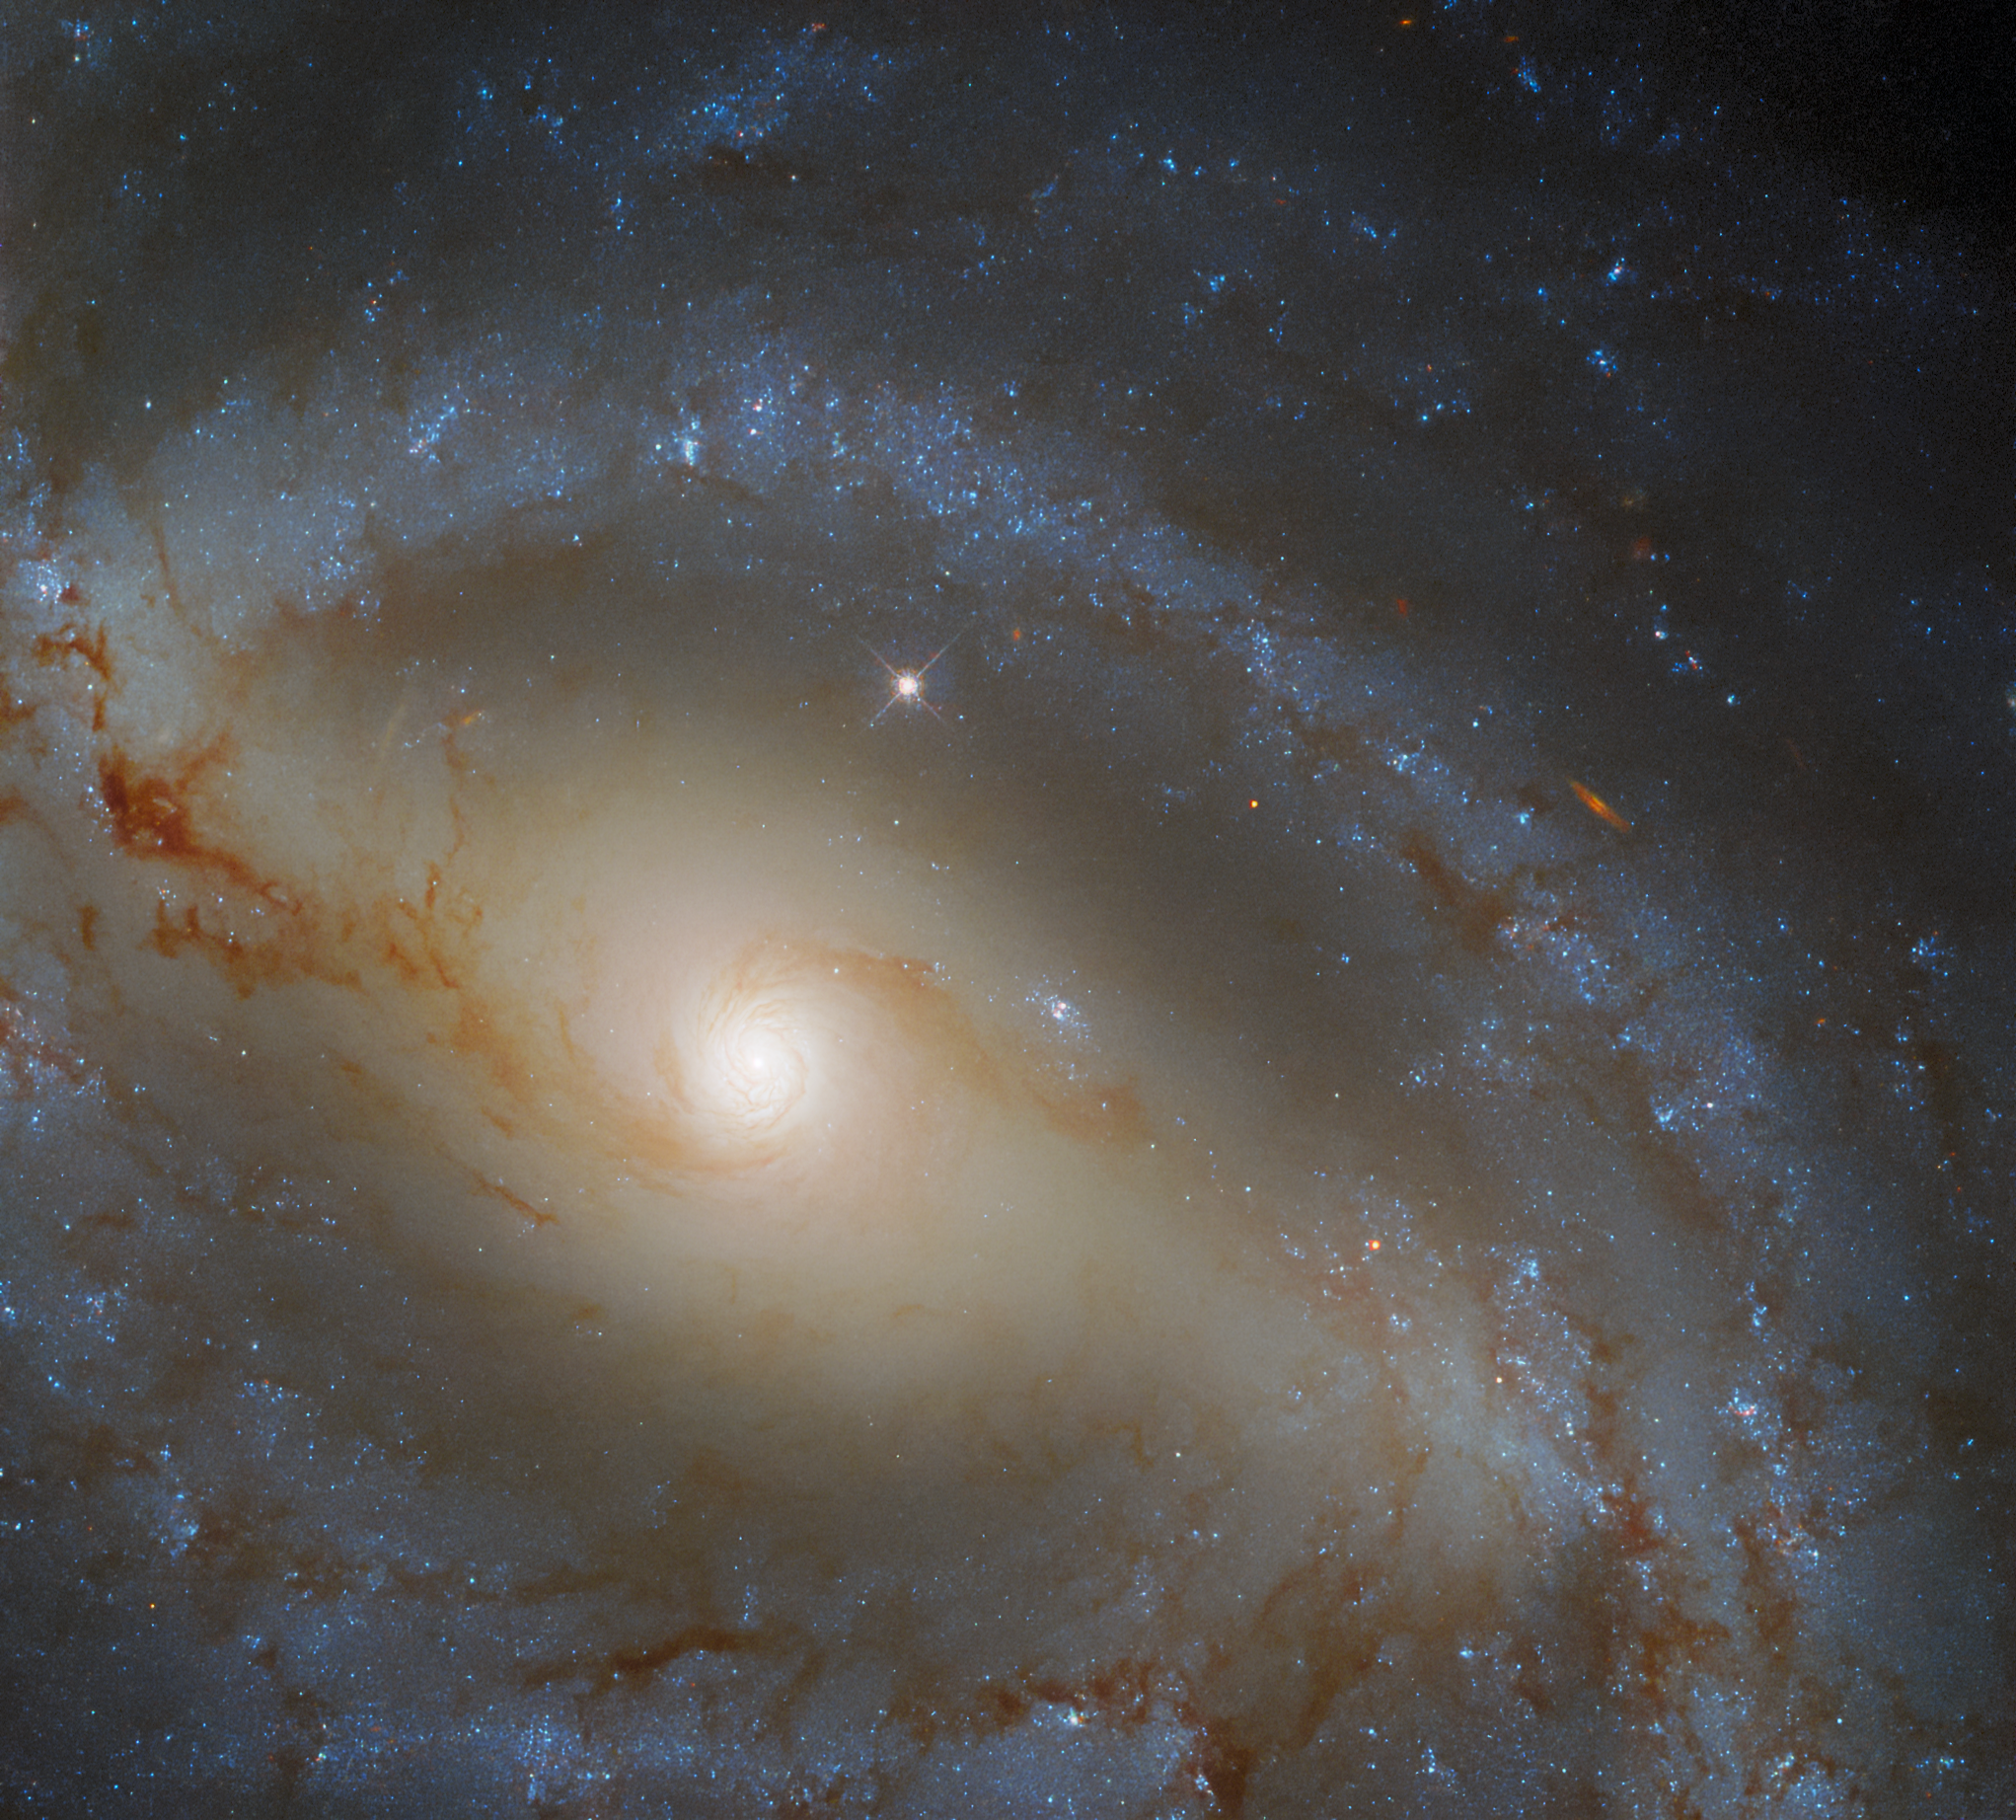

Hubble Spies a Serpentine Spiral Galaxy

The lazily winding spiral arms of the galaxy NGC 5921 snake across this image from the NASA/ESA Hubble Space Telescope. This galaxy lies approximately 80 million light-years from Earth, and much like our own galaxy, the Milky Way, contains a prominent bar. Roughly half of all spiral galaxies are thought to contain bars, and these bars affect their parent galaxies by fuelling star formation and affecting the motion of stars and interstellar gas.

Appropriately, given NGC 5921’s serpentine spiral arms, this galaxy resides in the constellation Serpens in the northern celestial hemisphere. Serpens is the only one of the 88 modern constellations to consist of two unconnected regions — Serpens Caput and Serpens Cauda. These two regions — whose names mean the Serpent’s Head and the Serpent’s Tail, respectively — are separated by Ophiuchus, the Serpent Bearer.

The scientific study behind this image was also split into two parts — observations from Hubble’s Wide Field Camera 3 and observations from the ground-based Gemini Observatory. These two observatories joined forces to better understand the relationship between galaxies like NGC 5921 and the supermassive black holes they contain. Hubble’s contribution to the study was to determine the masses of stars in the galaxies and also to take measurements that help calibrate the observations from Gemini. Together, the Hubble and Gemini observations provided astronomers with a census of nearby supermassive black holes in a diverse variety of galaxies.

Credit: ESA/Hubble & NASA, J. Walsh Acknowledgement: R. Colombari